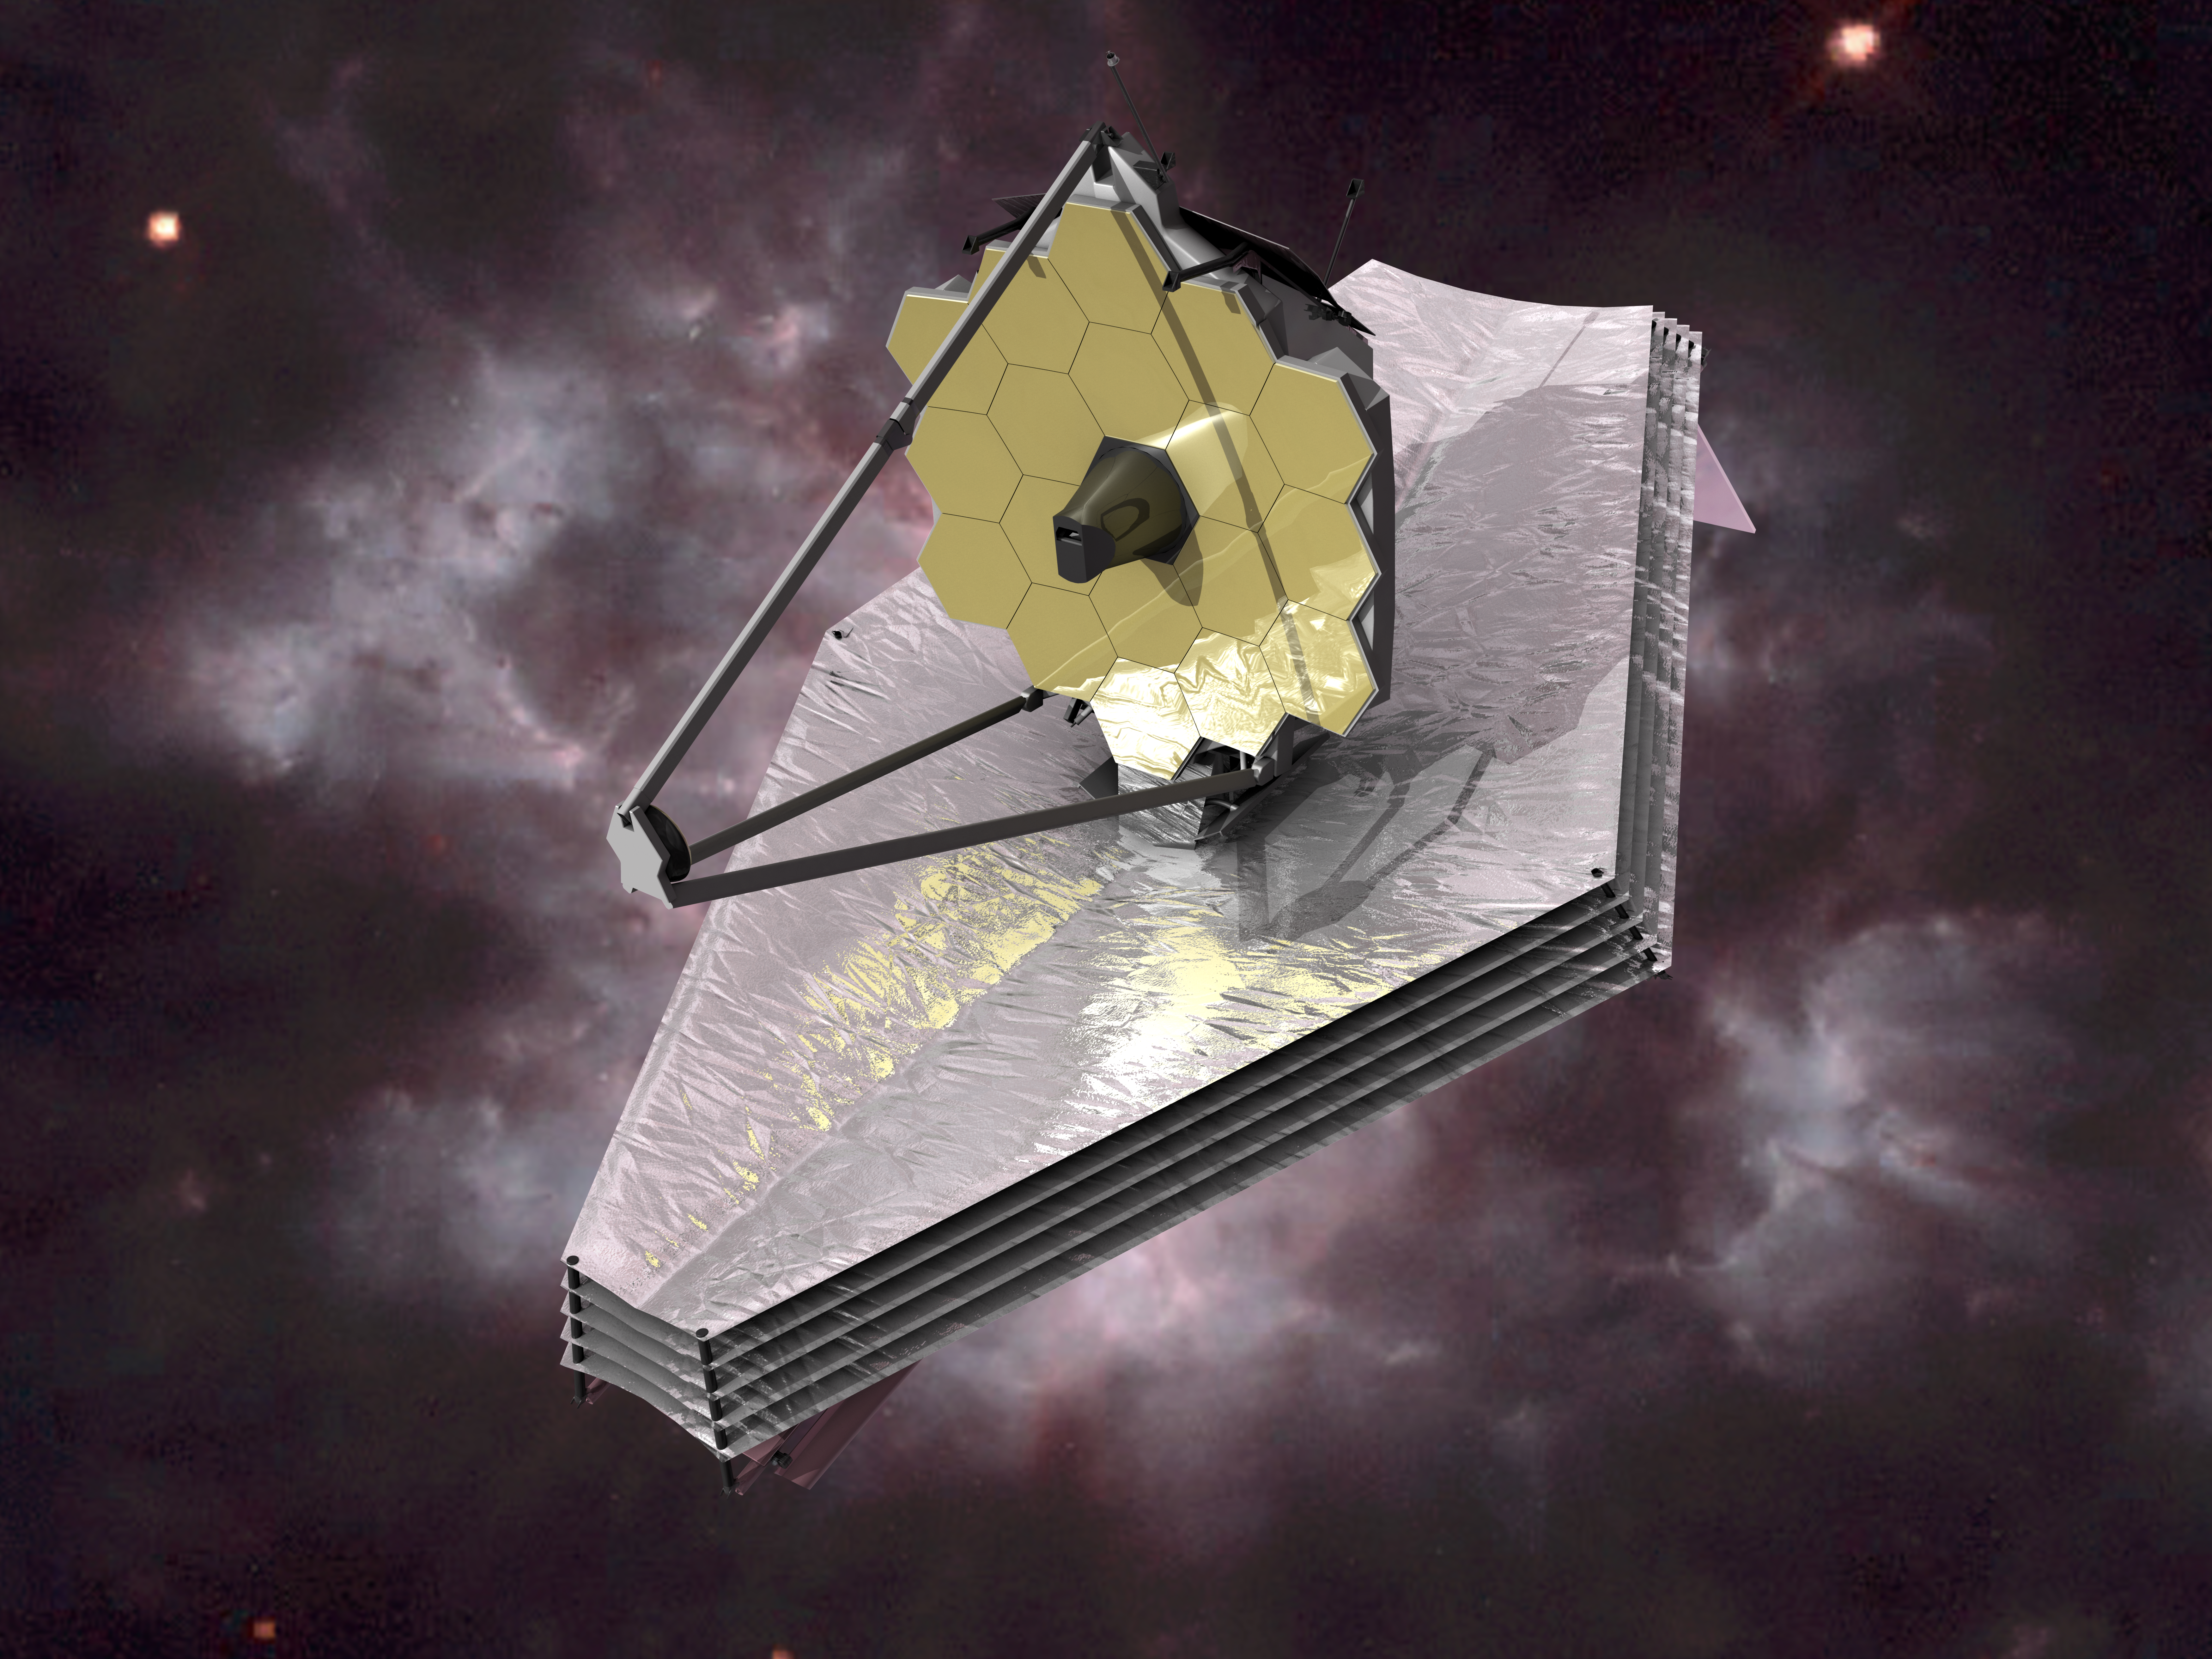

James Webb Space Telescope (artist's impression)

The James Webb Space Telescope

Credit: ESA (C. Carreau)